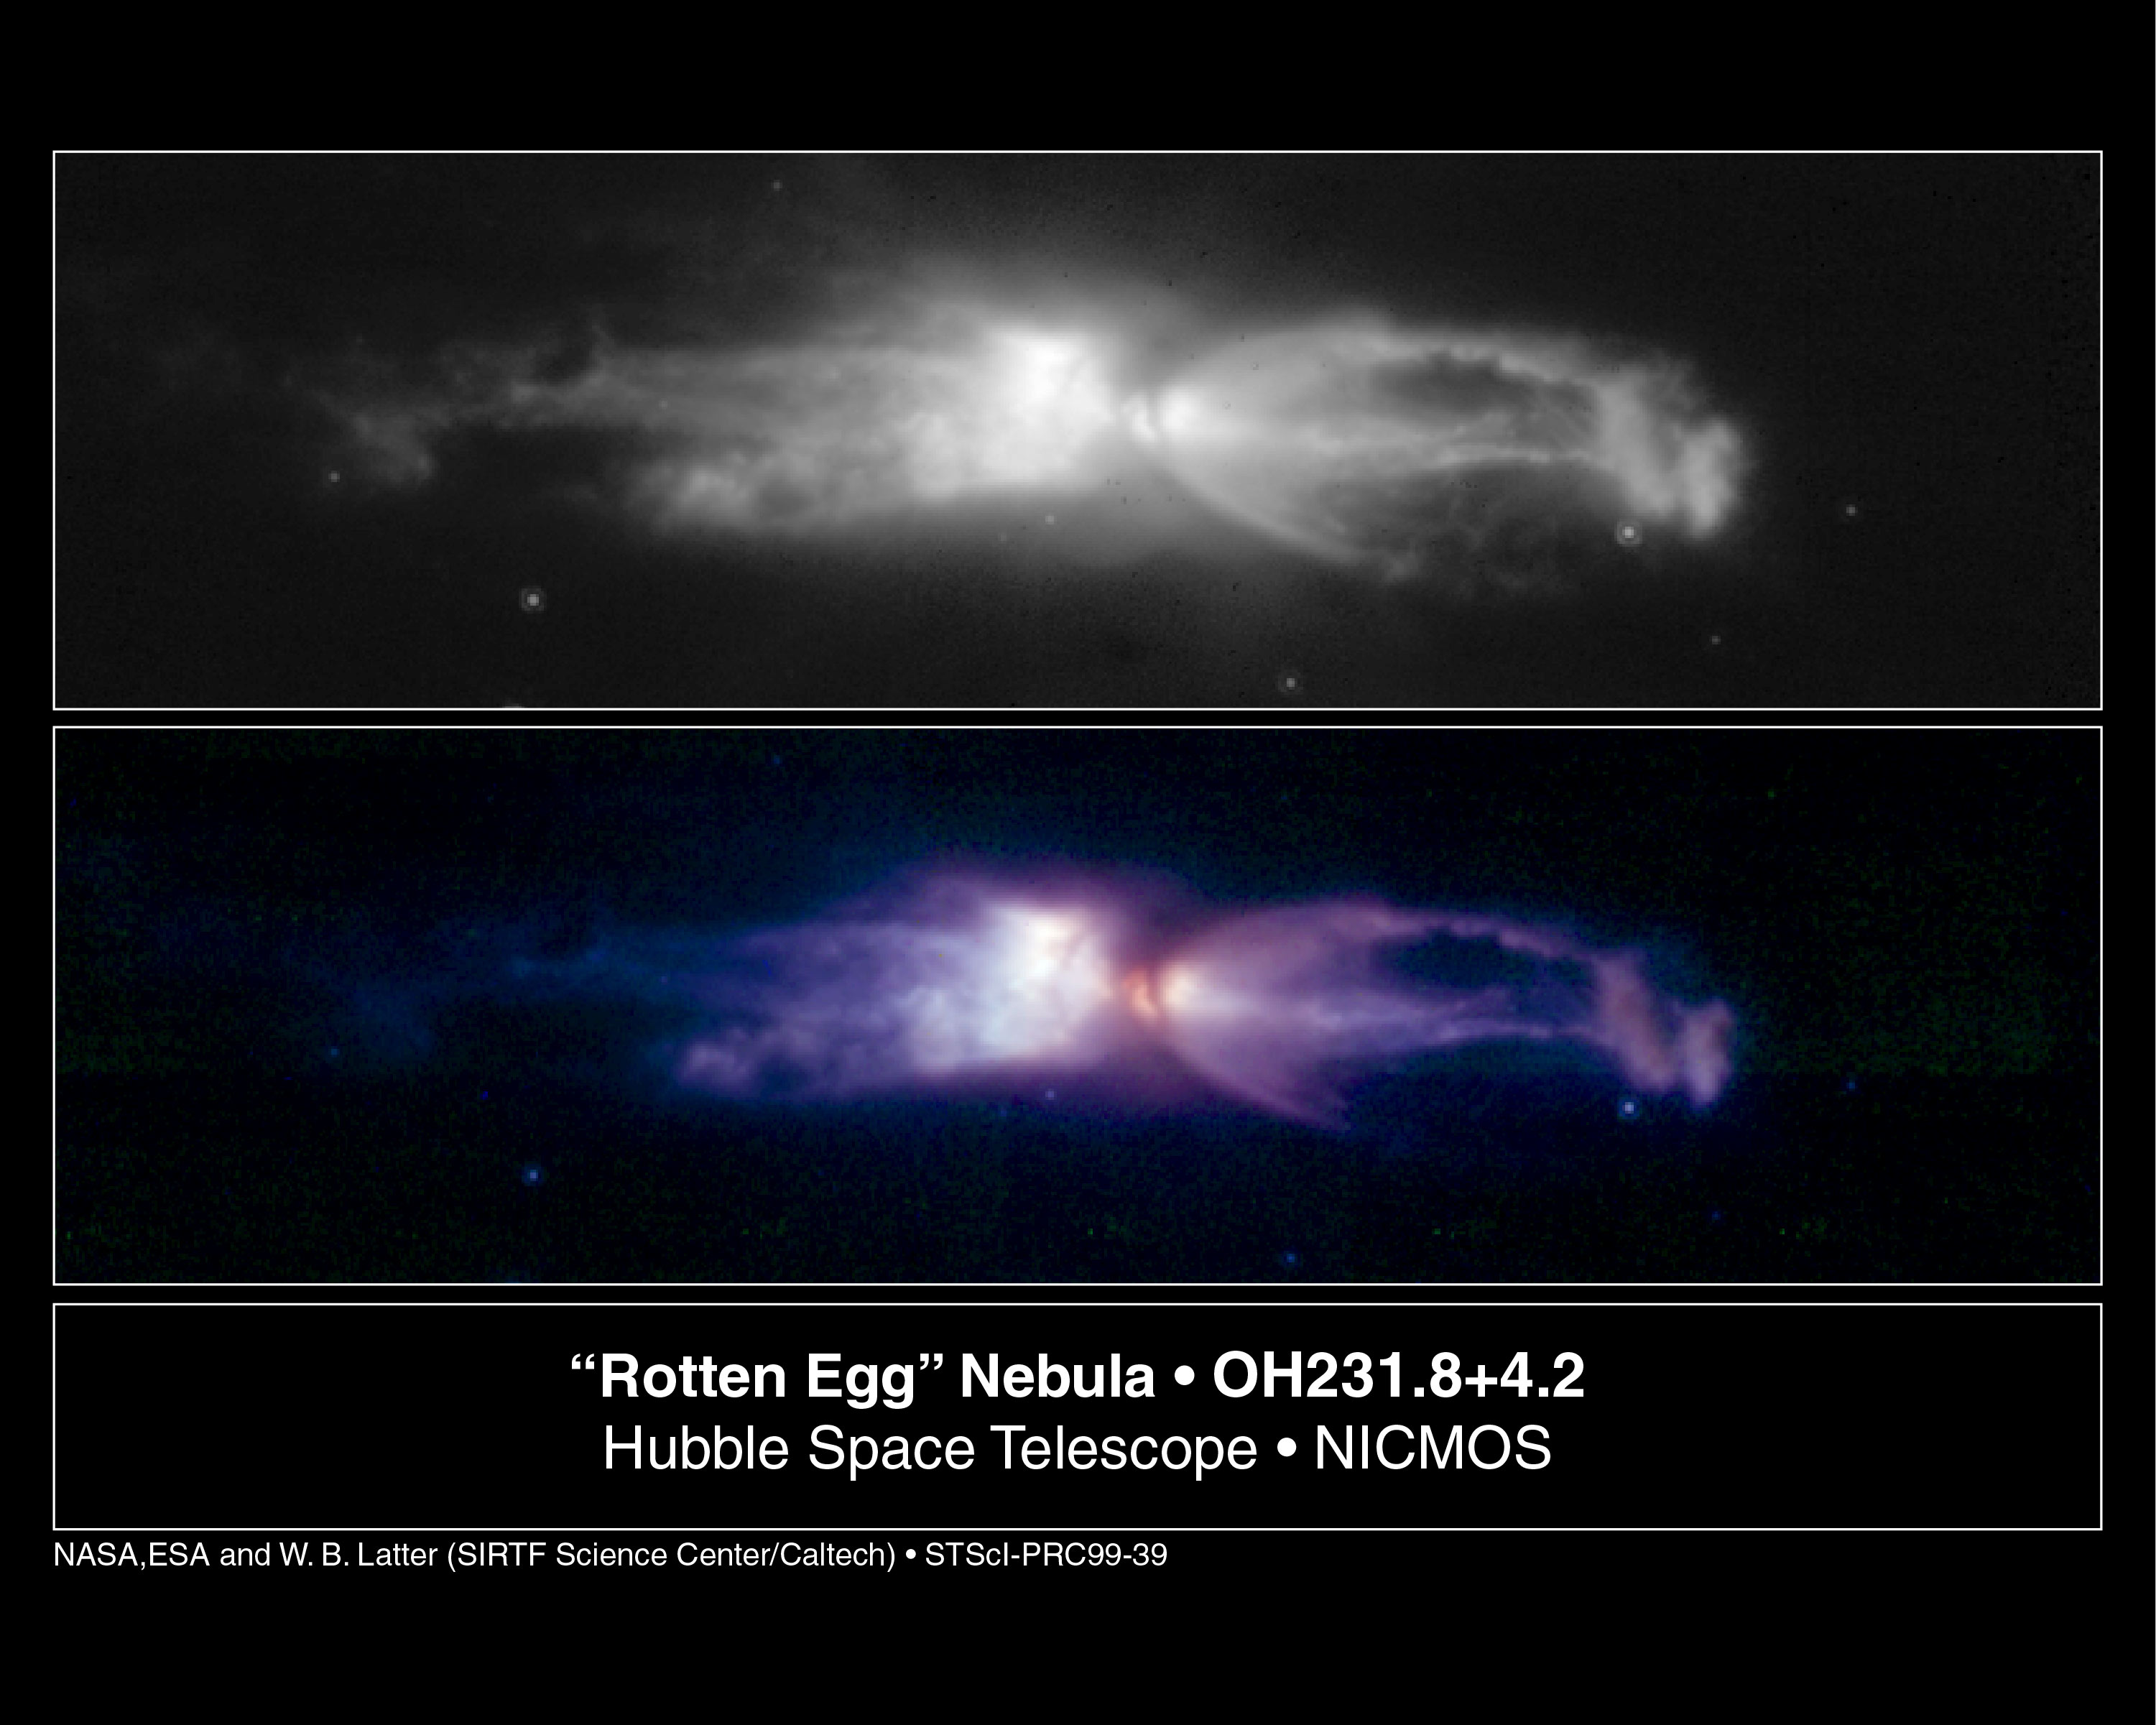

The 'Rotten Egg' Nebula - a Planetary Nebula in the Making

The object shown in these NASA/ESA Hubble Space Telescope images is a remarkable example of a star going through death throes just as it dramatically transforms itself from a normal red giant star into a planetary nebula. This process happens so quickly that such objects are quite rare, even though astronomers believe that most stars like the Sun will eventually go through such a phase.

Credit: NASA & ESA